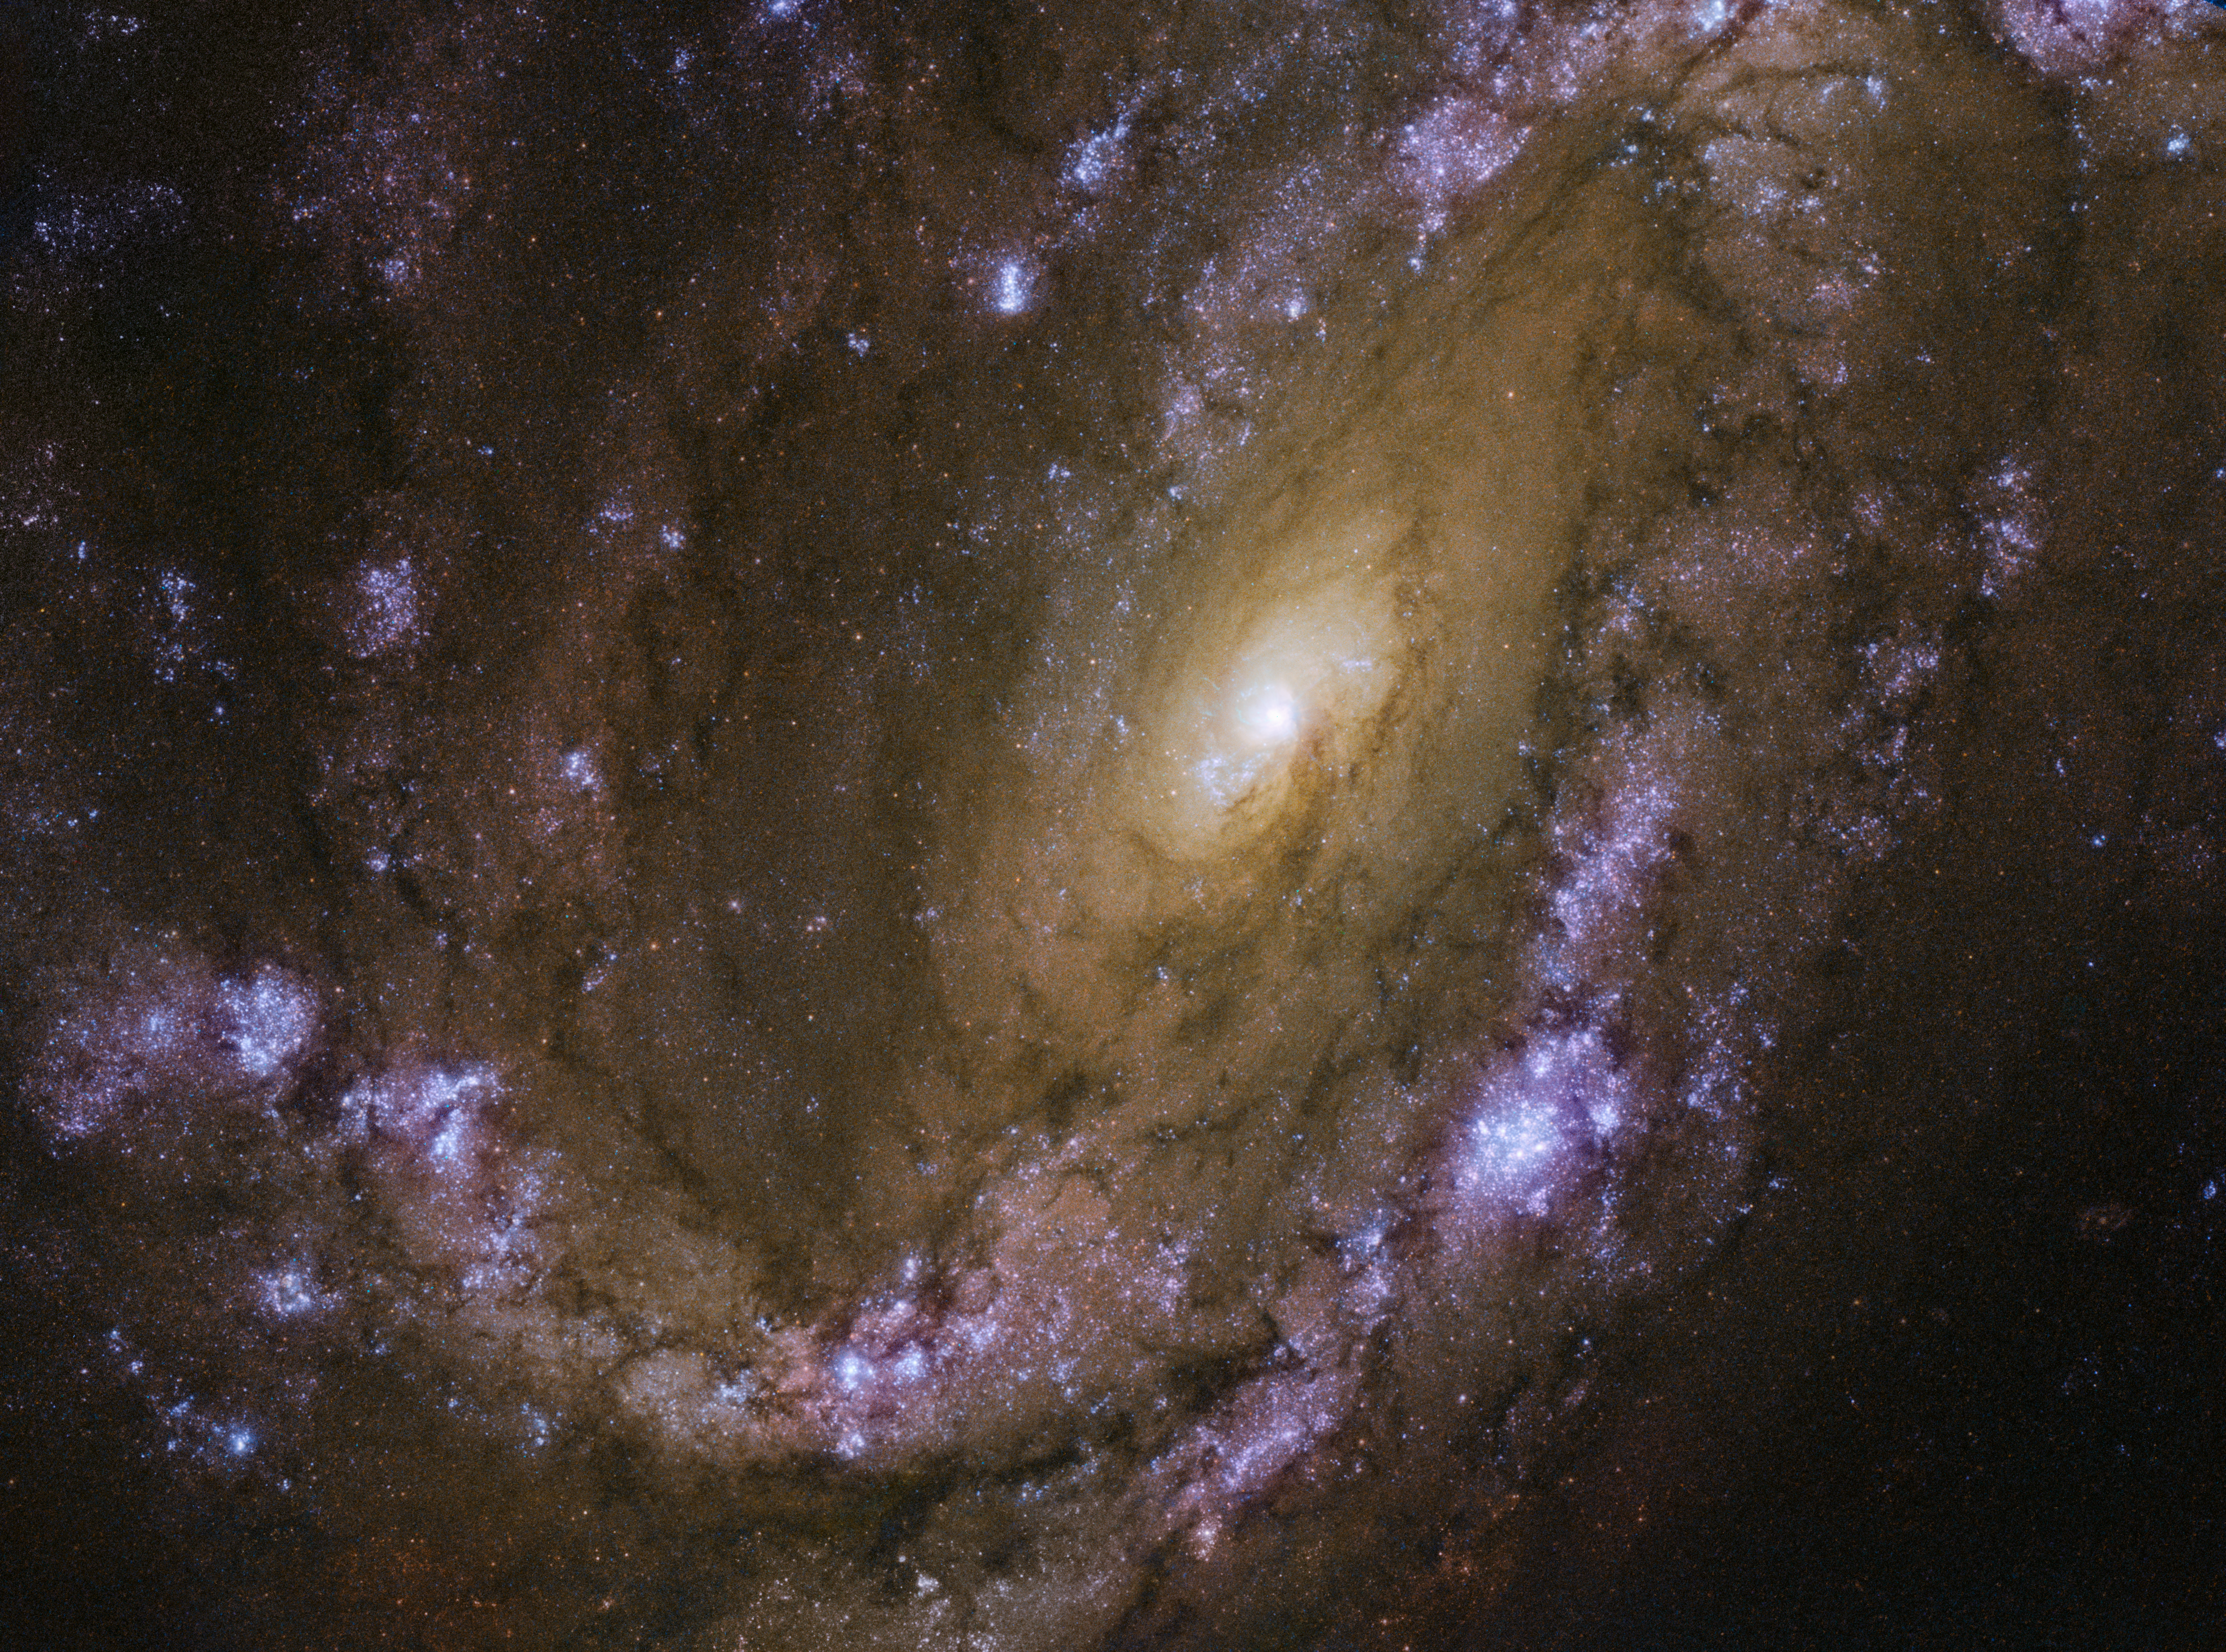

An explosive galaxy

When massive stars die at the end of their short lives, they light up the cosmos with bright, explosive bursts of light and material known as supernovae. A supernova event is incredibly energetic and intensely luminous — so much so that it forms what looks like an especially bright new star that slowly fades away over time.

These exploding stars glow so incredibly brightly when they first form that they can be spotted from afar using telescopes such as the NASA/ESA Hubble Space Telescope. The subject of this image, a spiral galaxy named NGC 4051 — about 45 million light-years from Earth — has hosted multiple supernovae in past years. The first was spotted in 1983 (SN 1983I), the second in 2003 (SN 2003ie), and the most recent in 2010 (SN 2010br). These explosive events were seen scattered throughout the centre and spiral arms of NGC 4051.

The SN 1983I and SN 2010br were both categorised as supernovae of type Ic. This type of supernova is produced by the core collapse of a massive star that has lost its outer layer of hydrogen and helium, either via winds or by mass transfer to a companion. Because of this, type Ic — and also type Ib — supernovae are sometimes referred to as stripped core-collapse supernovae.

NGC 4501 sits in the southern part of a cluster of galaxies known as the Ursa Major I Cluster; this cluster is especially rich in spirals such as NGC 4051, and is a subset of the larger Virgo Supercluster, which also houses the Milky Way.

Credit: ESA/Hubble & NASA, D. Crenshaw and O. Fox